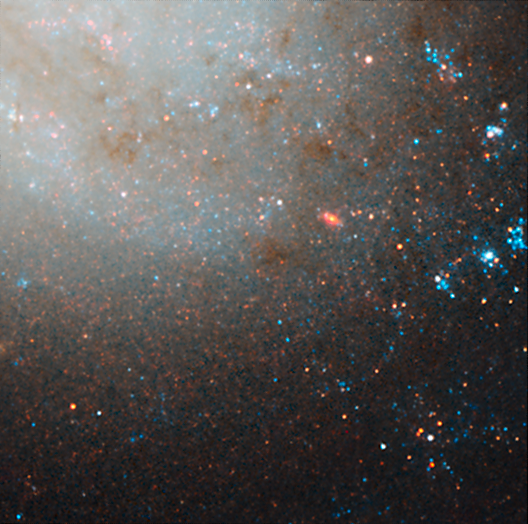

NGC 3021 NICMOS/ACS detail 2

This image is part of a montage of images of the spiral galaxy NGC 3021 taken by the NASA/ESA Hubble Space Telescope. Hubble made precise measurements of Cepheid variable stars in the galaxy, highlighted in this image. These stars pulsate at a rate that is matched closely to their intrinsic brightness. This makes them ideal for measuring intergalactic distances. The Cepheids are used to calibrate an even brighter milepost marker that can be used over greater distances, a Type Ia supernova. The supernova was observed in the galaxy in 1995. The image was taken with the Near Infrared Camera and Multi-Object Spectrometer (NICMOS).

Credit: NASA, ESA and A. Riess (STScI/JHU)